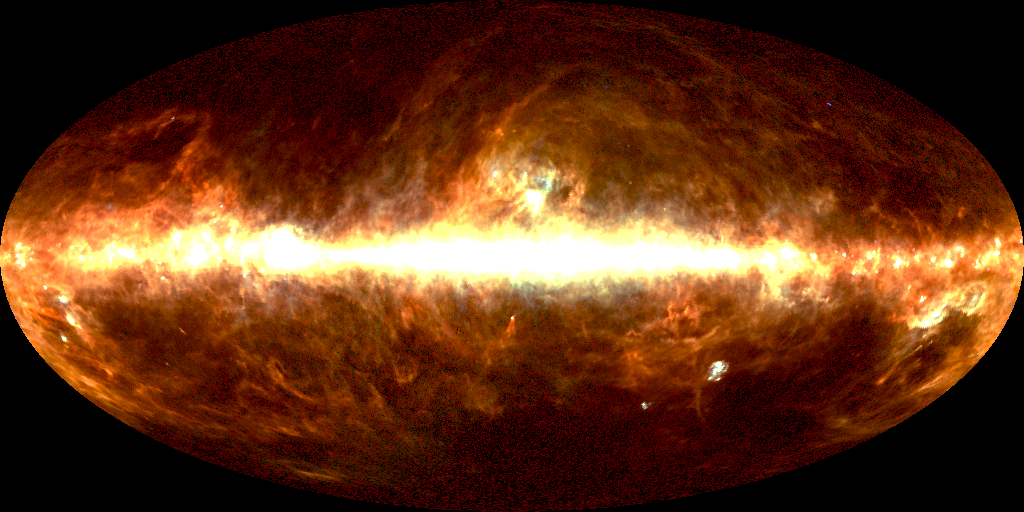

DIRBE 100 micrometer image of sky

Astronomers have assembled the first definitive detection of a background infrared glow across the sky produced by dust warmed by all the stars that have existed since the beginning of time. For scientists, the discovery of this "fossil radiation" is akin to turning out all the lights in a bedroom only to find the walls, floor, and ceiling aglow with an eerie luminescence.

Credit: Michael Hauser (STScI), the COBE/DIRBE Science Team, and NASA/ESA